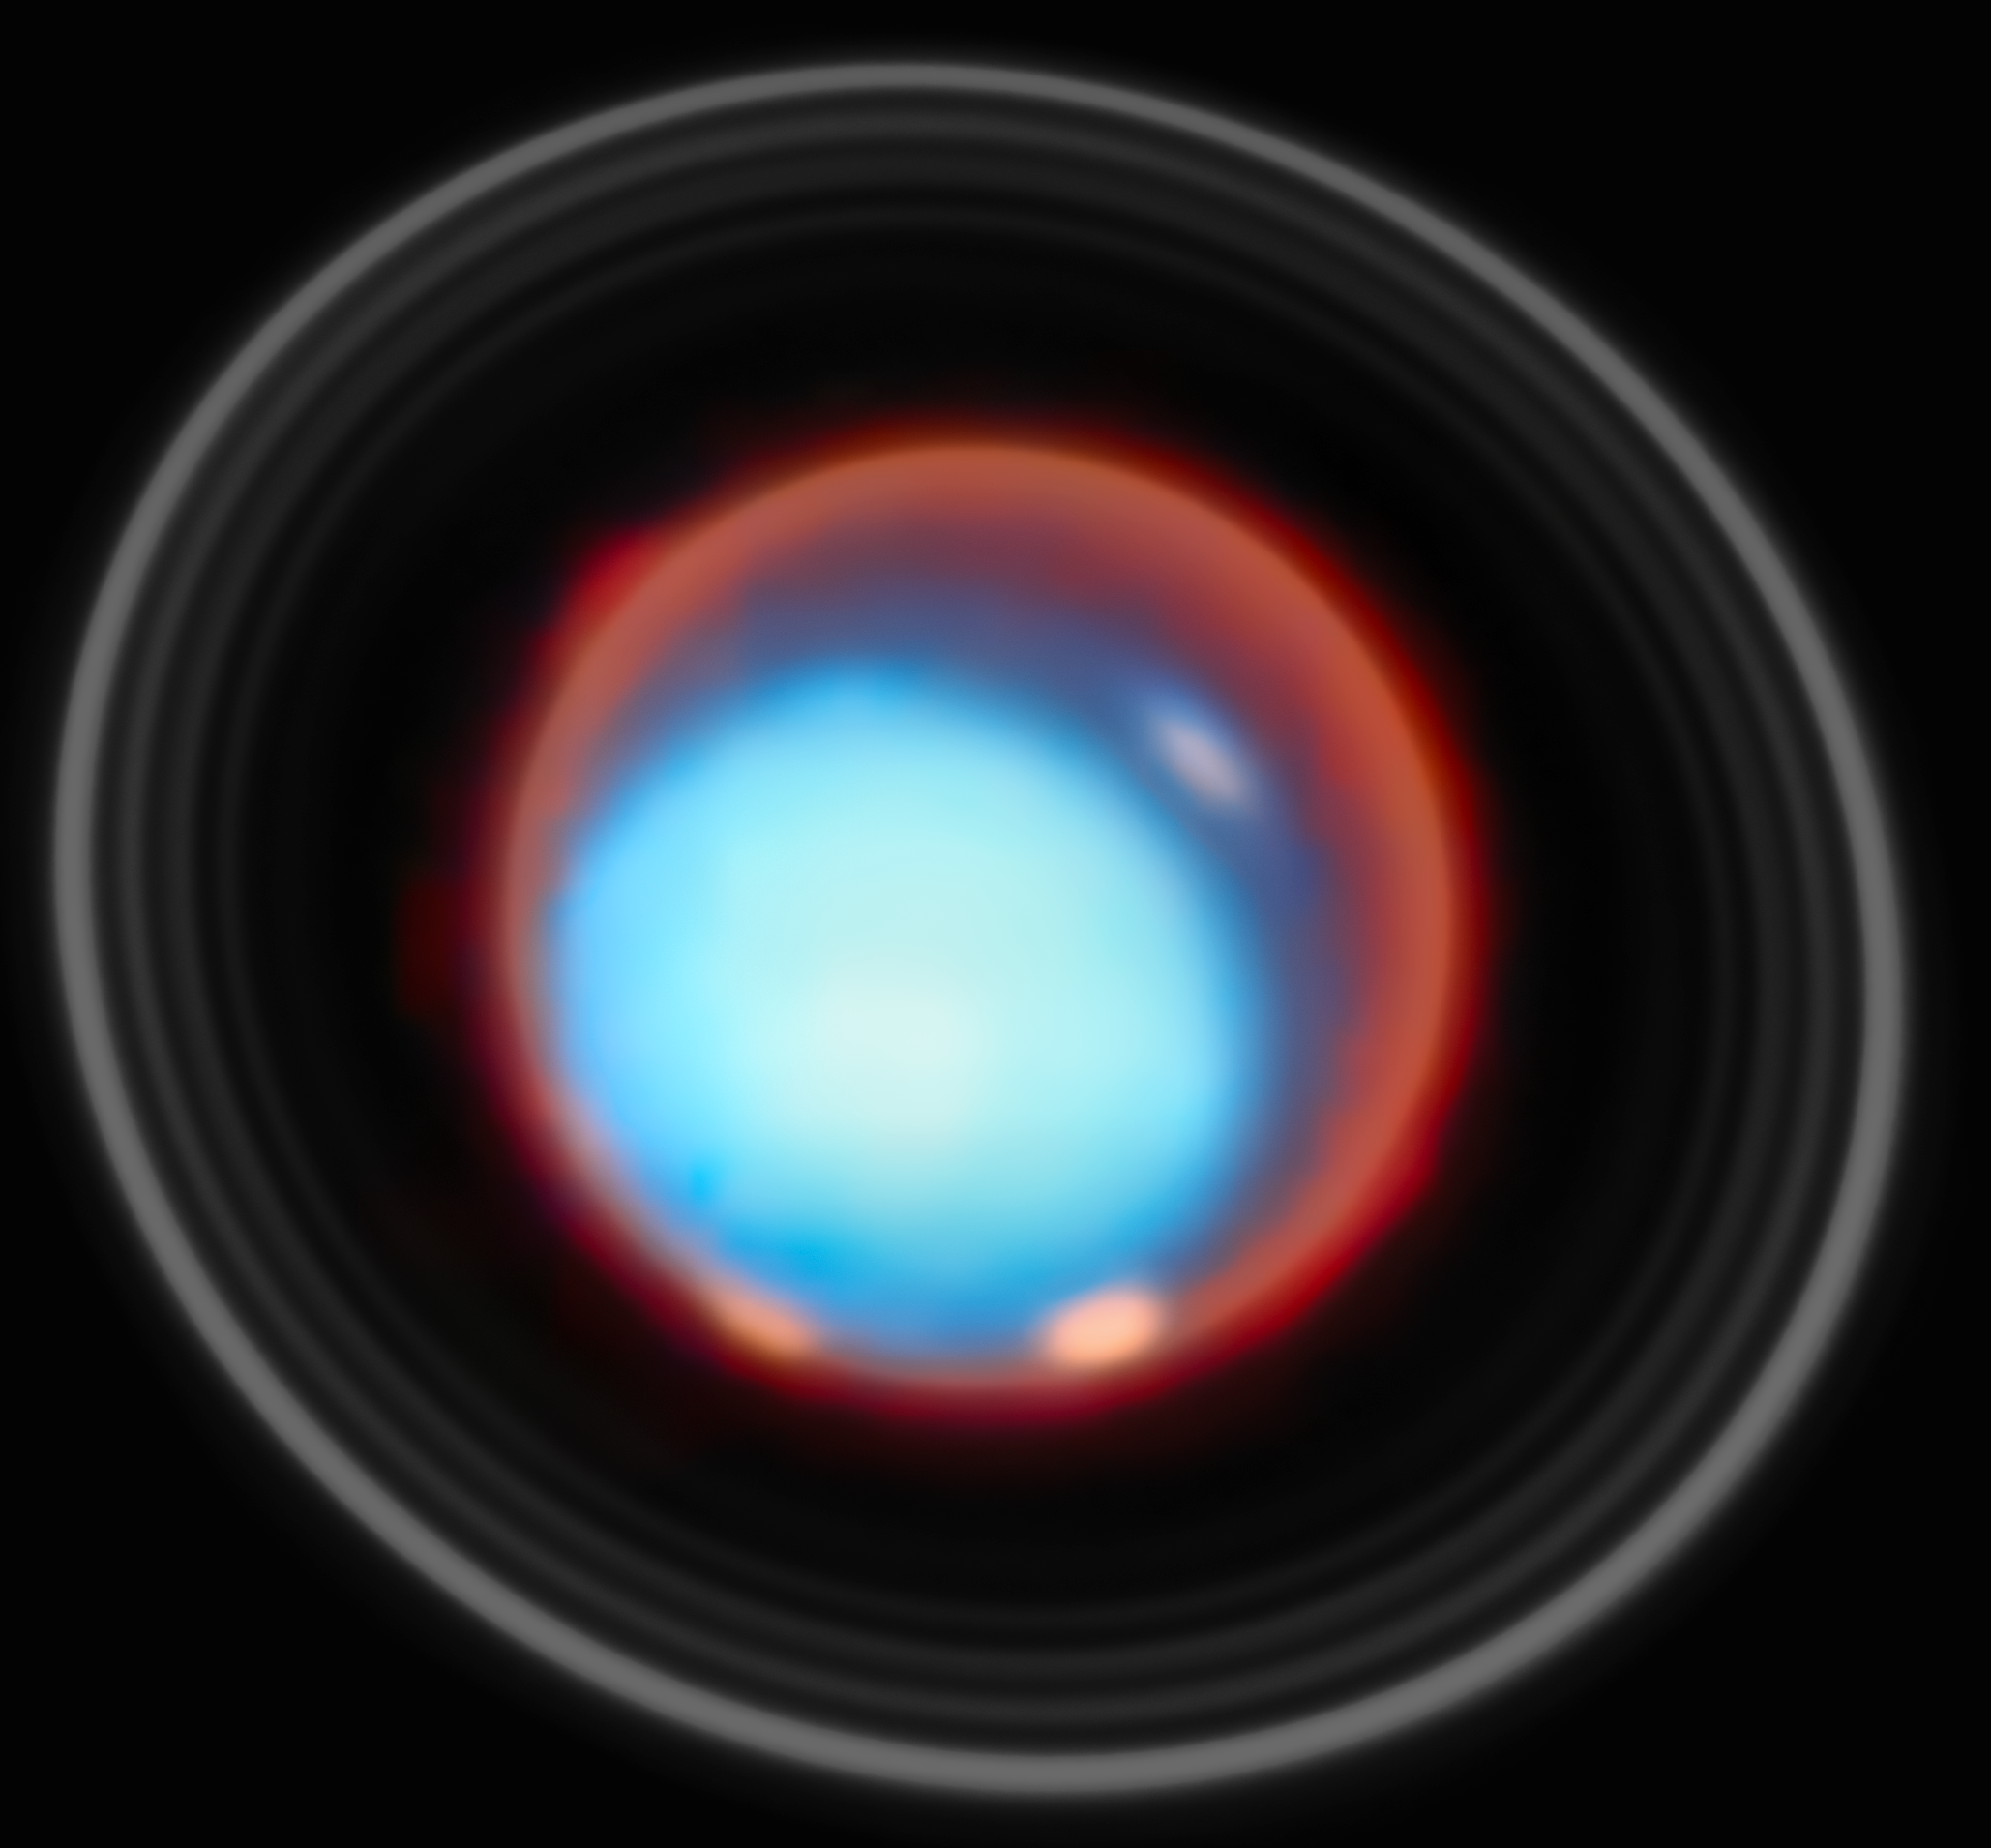

Uranus (January 2025)

For the first time, an international team of astronomers have mapped the vertical structure of Uranus’s upper atmosphere, uncovering how temperature and charged particles vary with height across the planet. Using Webb’s NIRSpec instrument, the team detected the faint glow from molecules high above the clouds. These unique data provide the most detailed portrait yet of where the planet’s auroras form, how they are influenced by its unusually tilted magnetic field, and how Uranus’s atmosphere has continued to cool over the past three decades. The results offer a new window into how ice-giant planets distribute energy in their upper layers.

Two bright auroral bands were detected near Uranus’s magnetic poles, together with reduced emission and ion density in part of the region between the two bands (a feature likely linked to transitions in magnetic field lines).

Credit: ESA/Webb, NASA, CSA, STScI, P. Tiranti, H. Melin, M. Zamani (ESA/Webb)